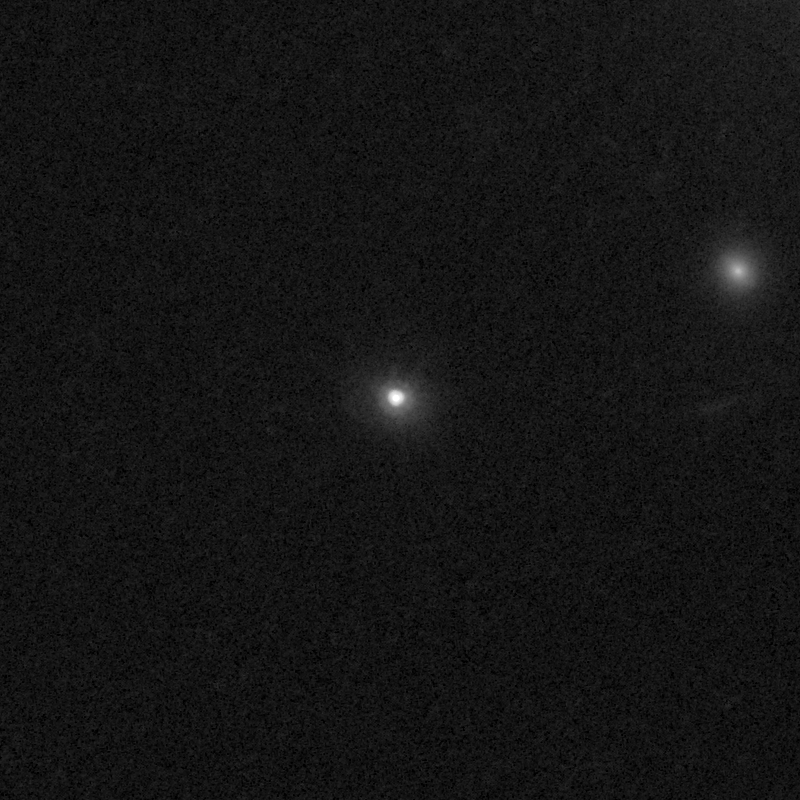

Outflows from merging galaxy J0944+0930

This NASA/ESA Hubble Space Telescope image of the galaxy J0944+0930 shows it is undergoing a firestorm of star birth, as shown by its bright white cores.

This star-making frenzy was ignited by mergers with other galaxies. The odd shape of the galaxy is telltale evidence of a close encounters.

The new Hubble Wide Field Camera 3 observations of this and eleven other galaxies undergoing the same process suggest that energy from the star-birthing frenzies created powerful winds that are blowing out the gas, meaning it is not available to form future generations of stars.

This activity occurred when the Universe was half its current age of 13.7 billion years. The gas-poor galaxies may eventually become so-called red and dead galaxies, composed only of aging stars.

This Hubble false-colour image was processed to bring out important details in the galaxy. The images were taken in 2010.

Credit: NASA, ESA, and P. Sell (Texas Tech University)